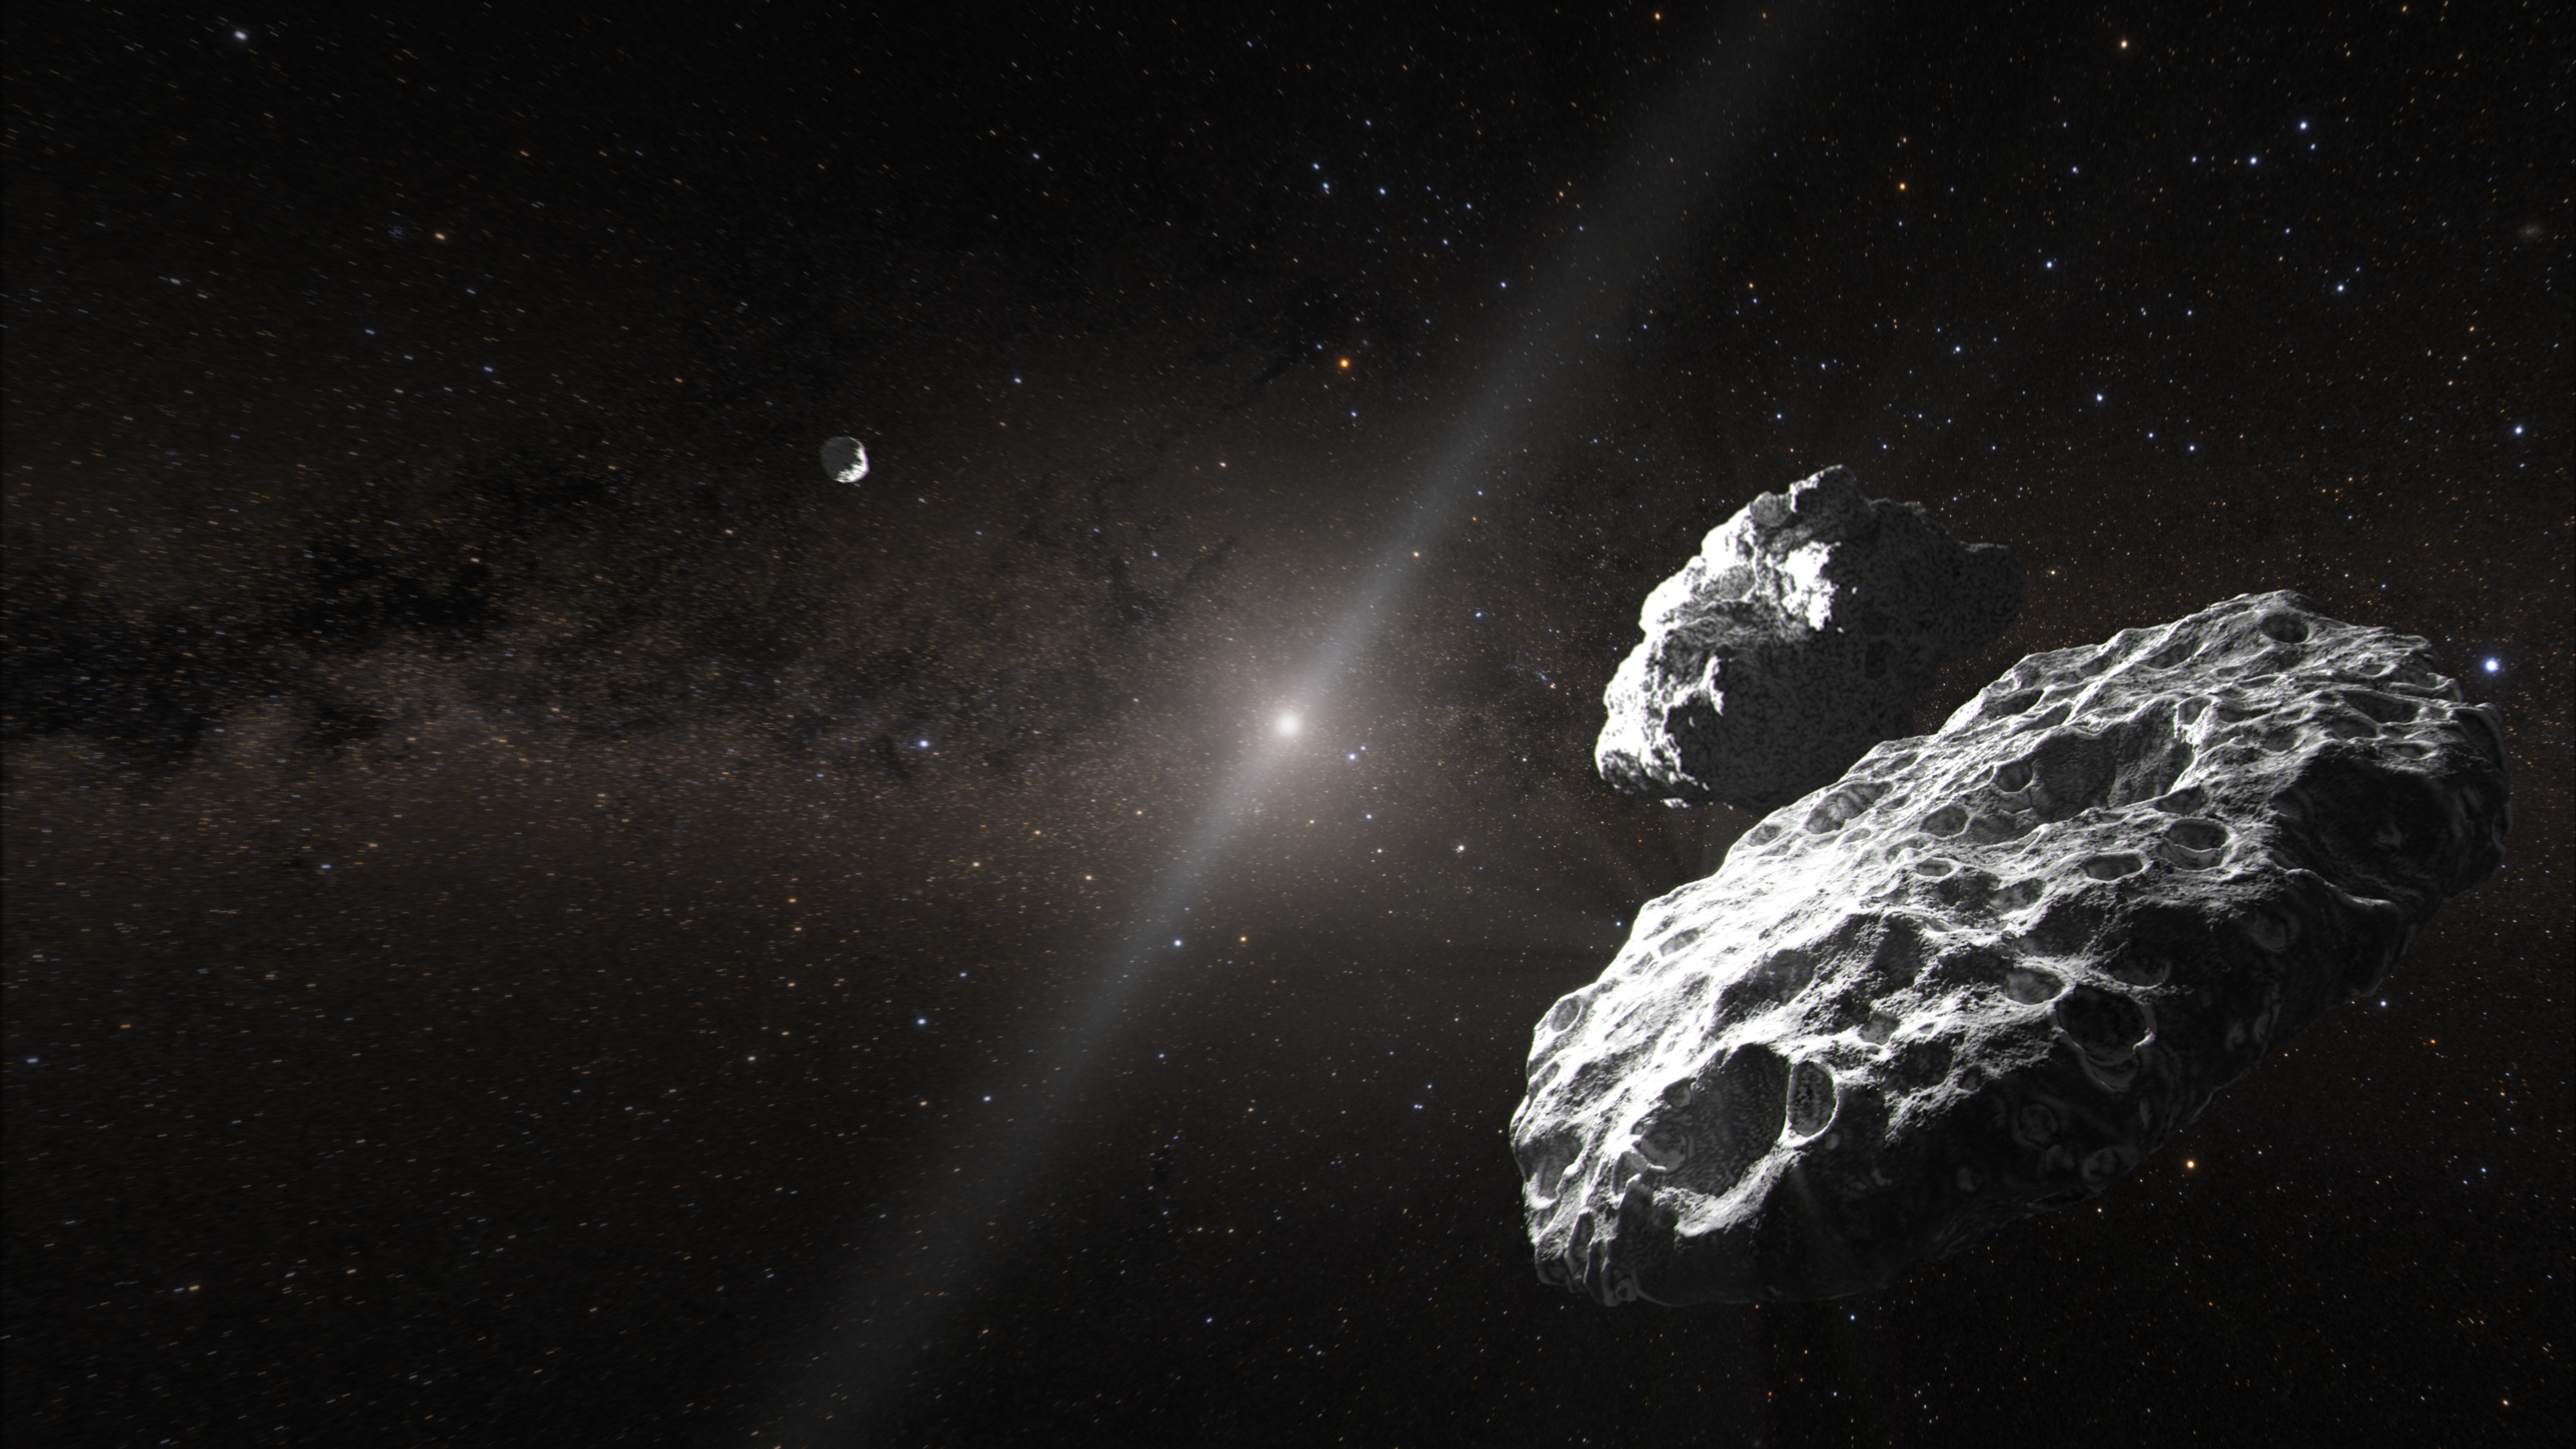

The Altjira system (artist’s concept)

This artist’s concept depicts one of the possible scenarios for the 148780 Altjira system in the solar system’s Kuiper Belt. It is likely a hierarchical triple formation, in which two very close companions are orbited by a third member at a greater distance.

The inner bodies are too close together to be resolved by the NASA/ESA Hubble Space Telescope. But Hubble observations of the orbit of the outermost object were used to determine that the central body is not a single spherical object. Other possibilities are that the inner object is a contact binary, where two separate bodies become so close they touch each other. Another idea is that the central body is oddly flat, like a pancake. Of the 40 identified binary objects in the Kuiper Belt, another system, Lempo, has been found to be a triple.

The Altjira system is located in the outer reaches of the solar system, 3.7 billion miles away, or 44 times the distance between Earth and the Sun. In this artist’s concept, our Sun is in the constellation Sagittarius, with the Milky Way in the background. The bright red star Antares appears at the top center. Dust in the plane of our solar system glows as zodiacal light.

Credit: NASA, ESA, J. Olmsted (STScI)